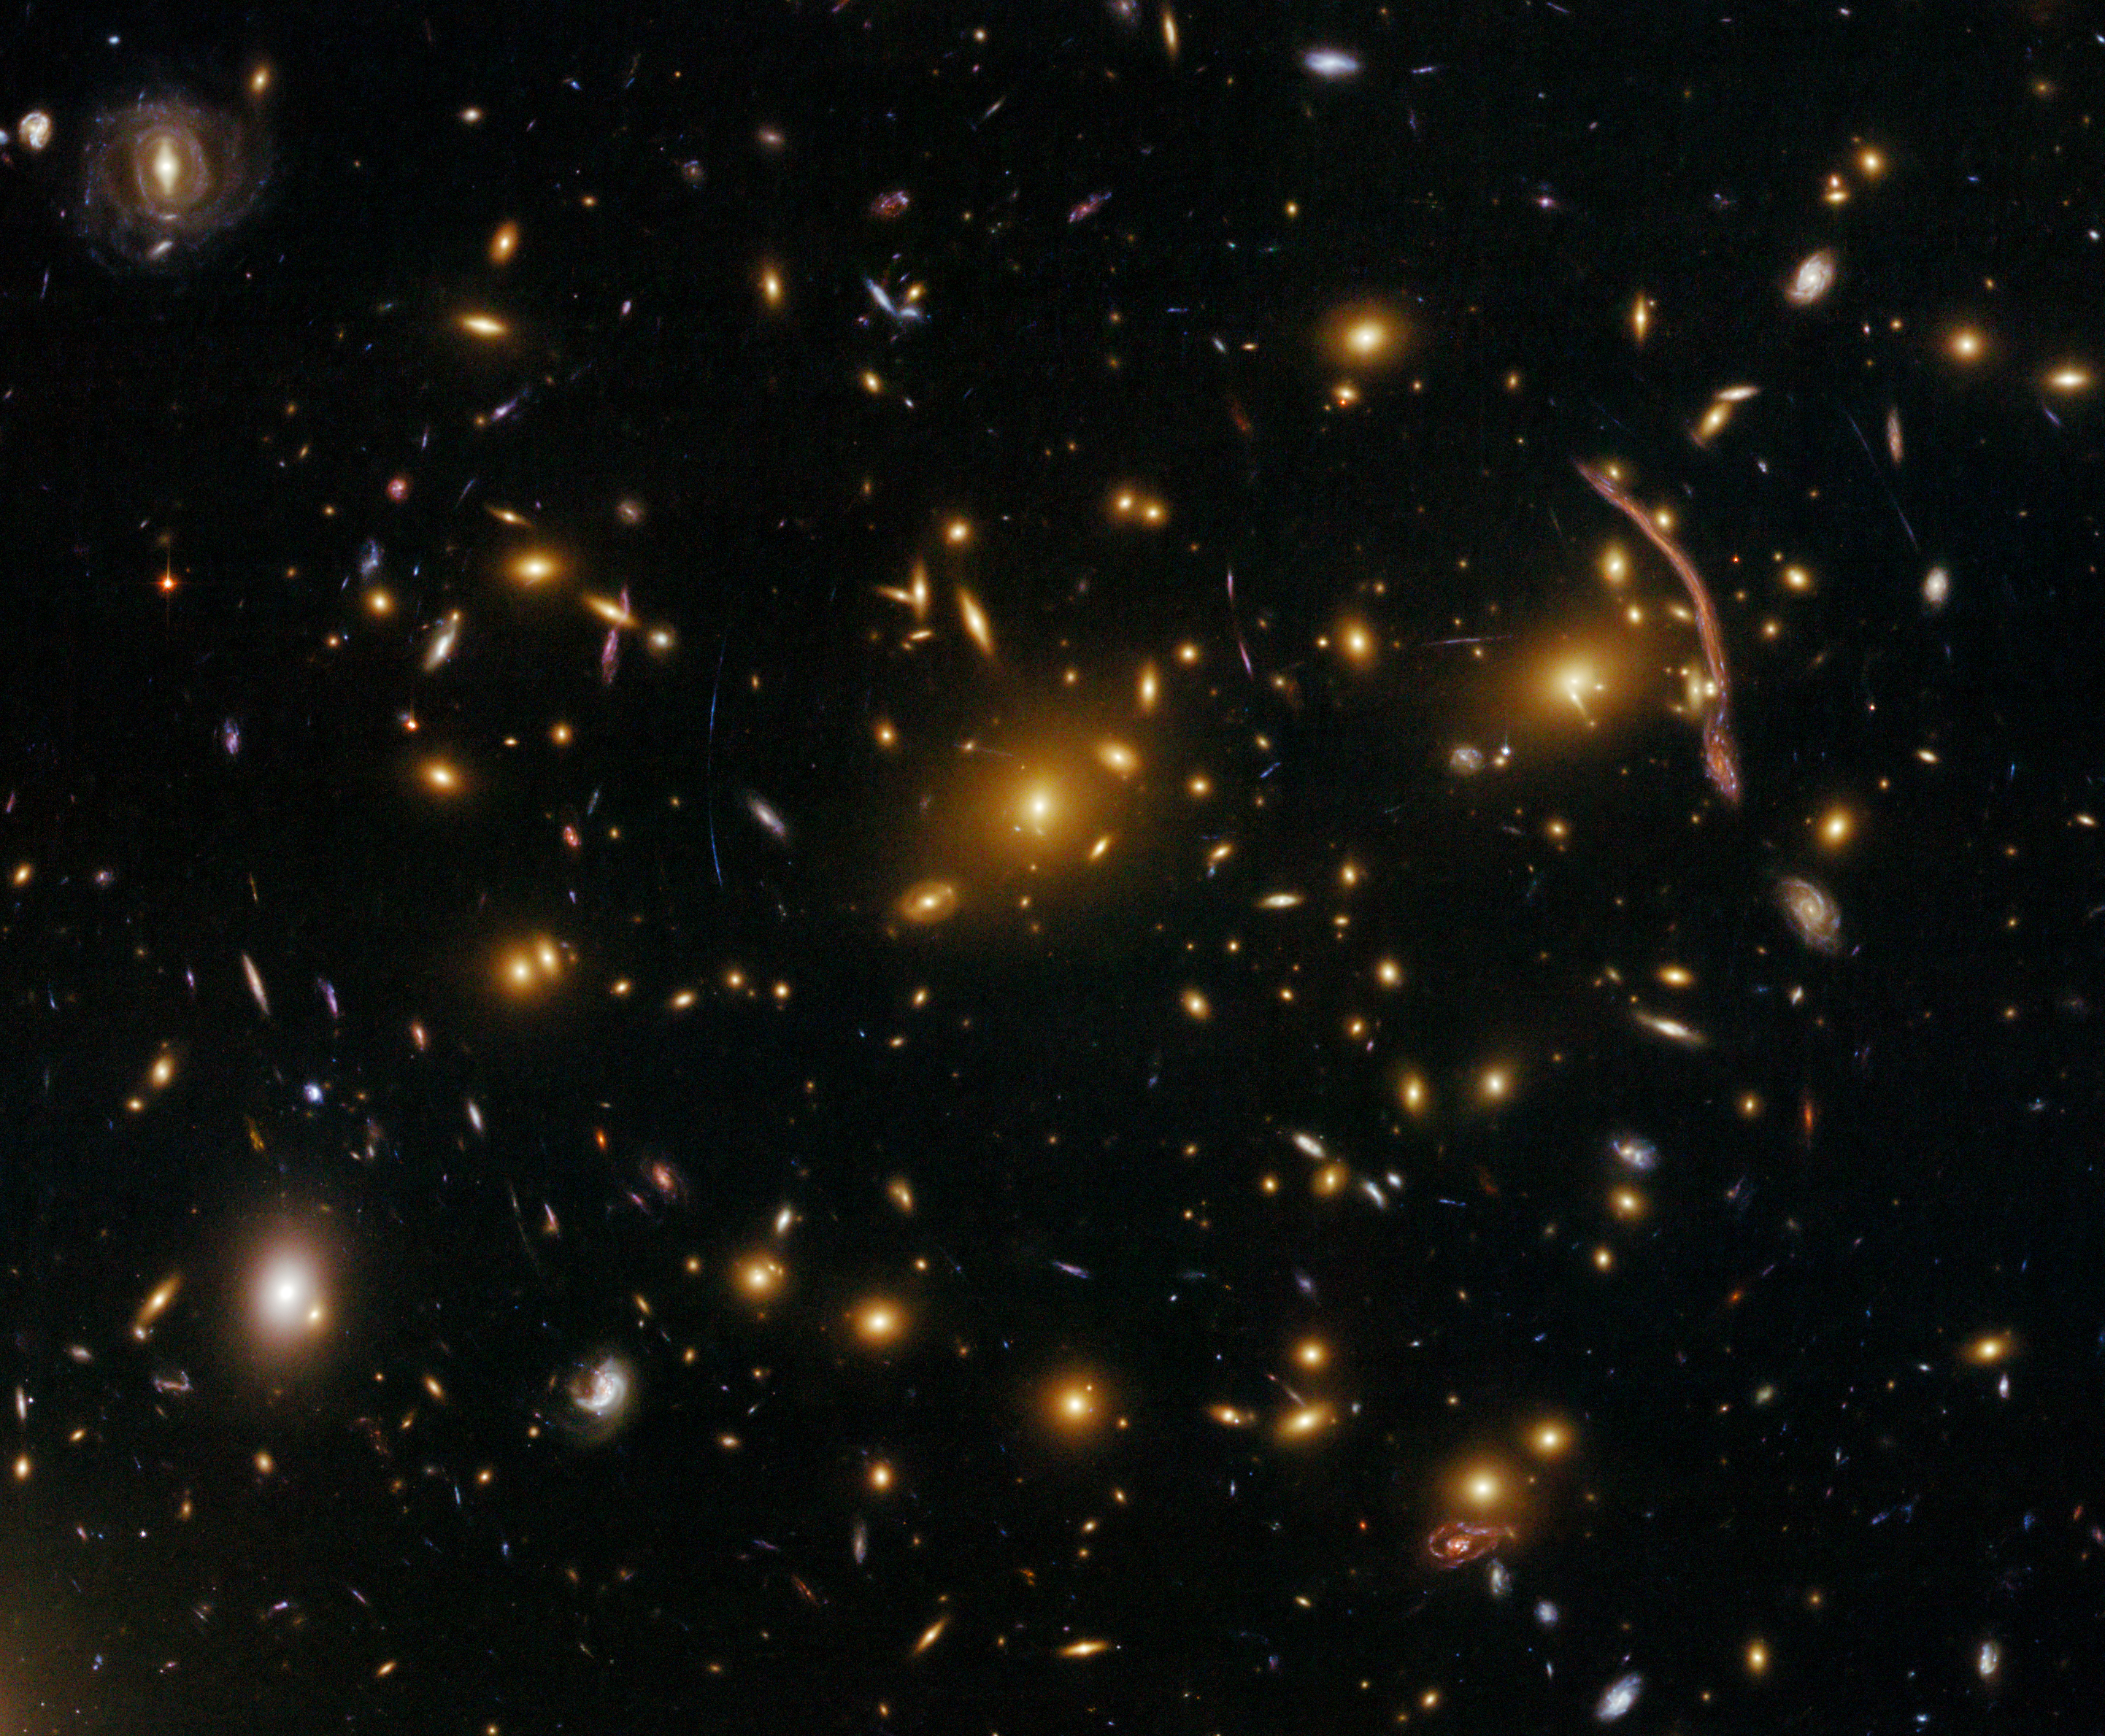

Gravitational lensing in the galaxy cluster Abell 370

The NASA/ESA Hubble Space Telescope's newly repaired Advanced Camera for Surveys (ACS) has peered across almost five billion light-years to resolve intricate details in the galaxy cluster Abell 370. Abell 370 is one of the very first galaxy clusters where astronomers observed the phenomenon of gravitational lensing, the warping of space-time by the cluster’s gravitational field that distorts the light from galaxies lying far behind it. This is manifested as arcs and streaks in the picture, which are the stretched images of background galaxies.

Gravitational lensing is a vital tool for astronomers when measuring the dark matter distribution in massive clusters, since the mass distribution can be reconstructed from observations of its gravitational effects.

Ground-based telescopic observations in the mid-1980s of the most prominent arc (near the right-hand side of the picture) allowed astronomers to deduce that the arc was not a structure of some kind within the cluster, but the gravitationally lensed image of an object twice as far away. Hubble has now resolved new, previously unseen details in the arc that reveal structure in the lensed background galaxy.

Galaxy clusters are the most massive structures of the Universe, located at the crossing of the filaments of the cosmic web of dark matter. The most massive clusters can contain up to 1000 galaxies and intergalactic hot gas, all held together primarily by the gravity of dark matter.

These observations were taken with Hubble's Advanced Camera for Surveys (ACS) in its Wide Field mode on 16 July 2009. The composite image was made using filters that isolate light from green, red and infrared wavelengths.

These Hubble data are part of the Hubble Servicing Mission 4 Early Release Observations.

Credit: NASA, ESA, the Hubble SM4 ERO Team and ST-ECF